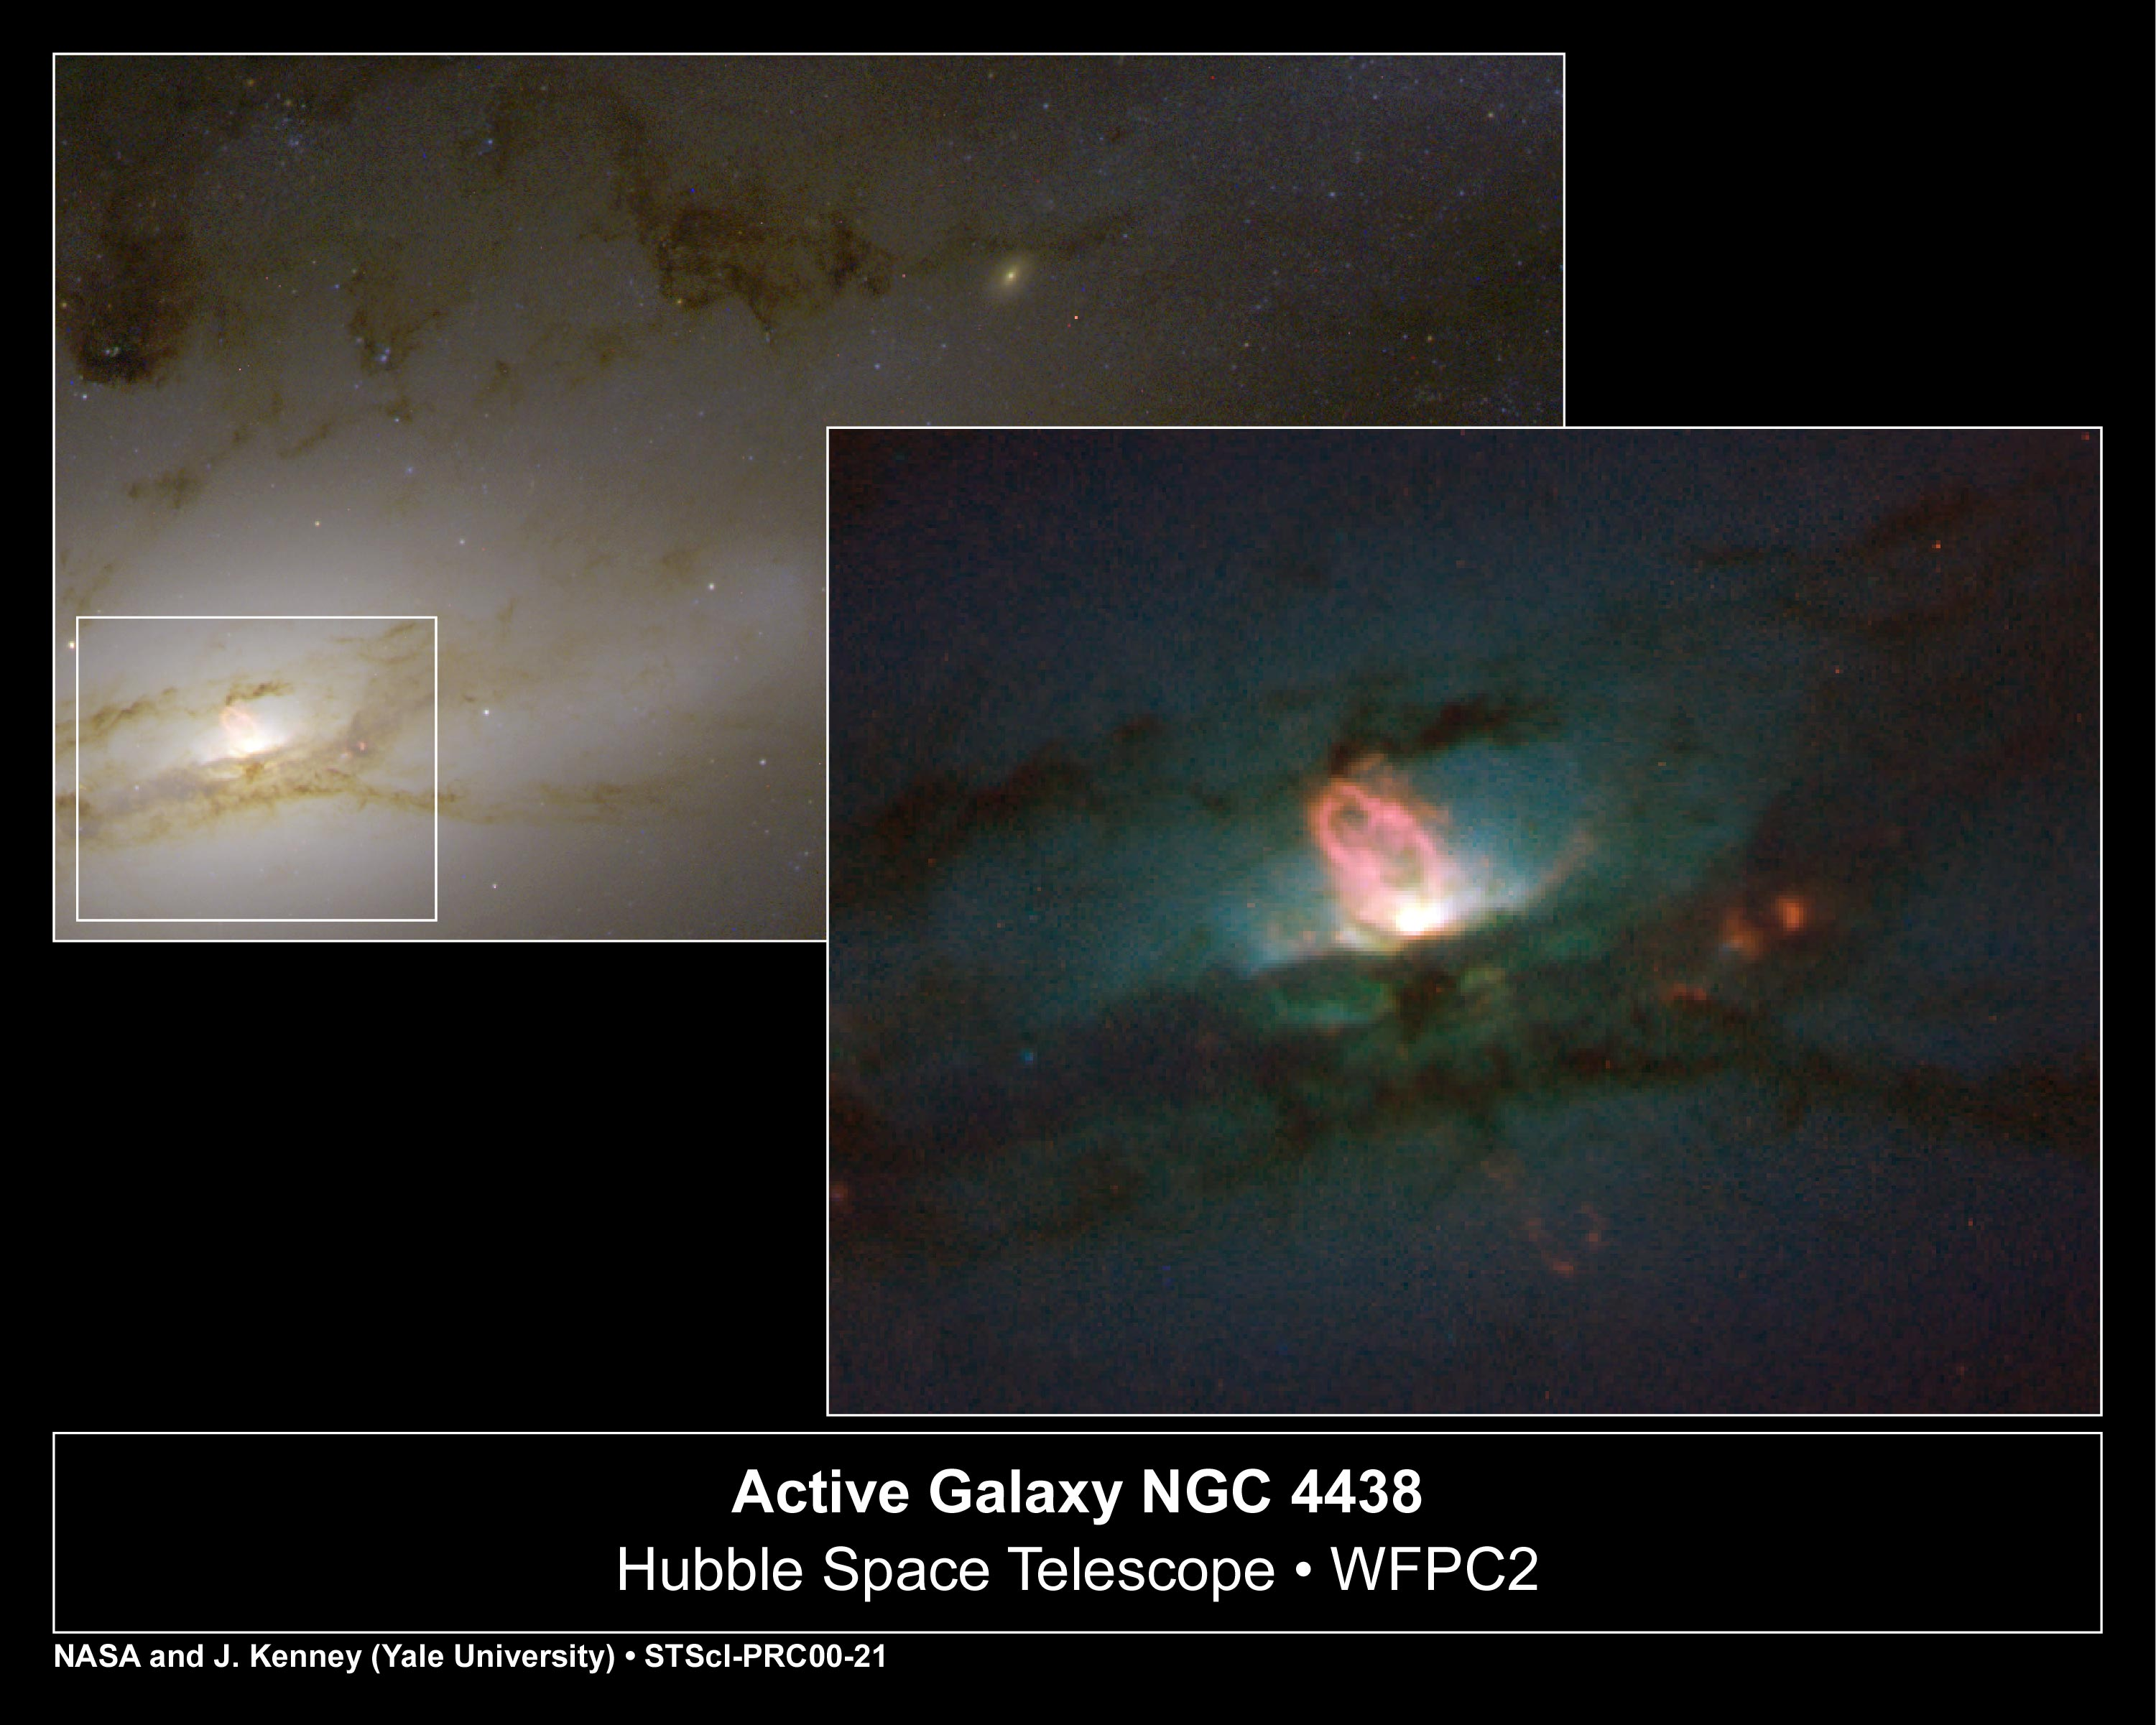

Active Galaxy NGC 4438

A monstrous black hole's rude table manners include blowing huge bubbles of hot gas into space. At least, that's the gustatory practice followed by the supermassive black hole residing in the hub of the nearby galaxy NGC 4438. Known as a peculiar galaxy because of its unusual shape, NGC 4438 is in the Virgo Cluster, 50 million light-years from Earth.

Credit: NASA/ESA, Jeffrey Kenney (Yale University), Elizabeth Yale (Yale University)